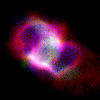

SMP 93 in the Large Magellanic Cloud

This planetary nebula is the relic of a dying star that expelled part of its atmosphere. Here, the blue colour records the glow of the oxygen and the red colour corresponds to hydrogen and nitrogen. Scientists are probing these illuminated stellar relics in our neighbouring galaxy, the Large Magellanic Cloud, because they are at relatively the same distance - about 168,000 light-years — from Earth. Knowing the distance to these objects allows scientists to compare their shapes and sizes, and precisely determine the brightness of their central stars. For this reason, even though these glowing remains of dying stars are about 50 times farther away than the stunning planetary nebulae photographed in the Milky Way, they are of invaluable importance.

Credit: NASA/ESA; L. Stanghellini, R. Shaw, C. Blades, and M. Mutchler, Space Telescope Science Institute, Baltimore, Md.; and B. Balick, University of Washington, Seattle, Wash